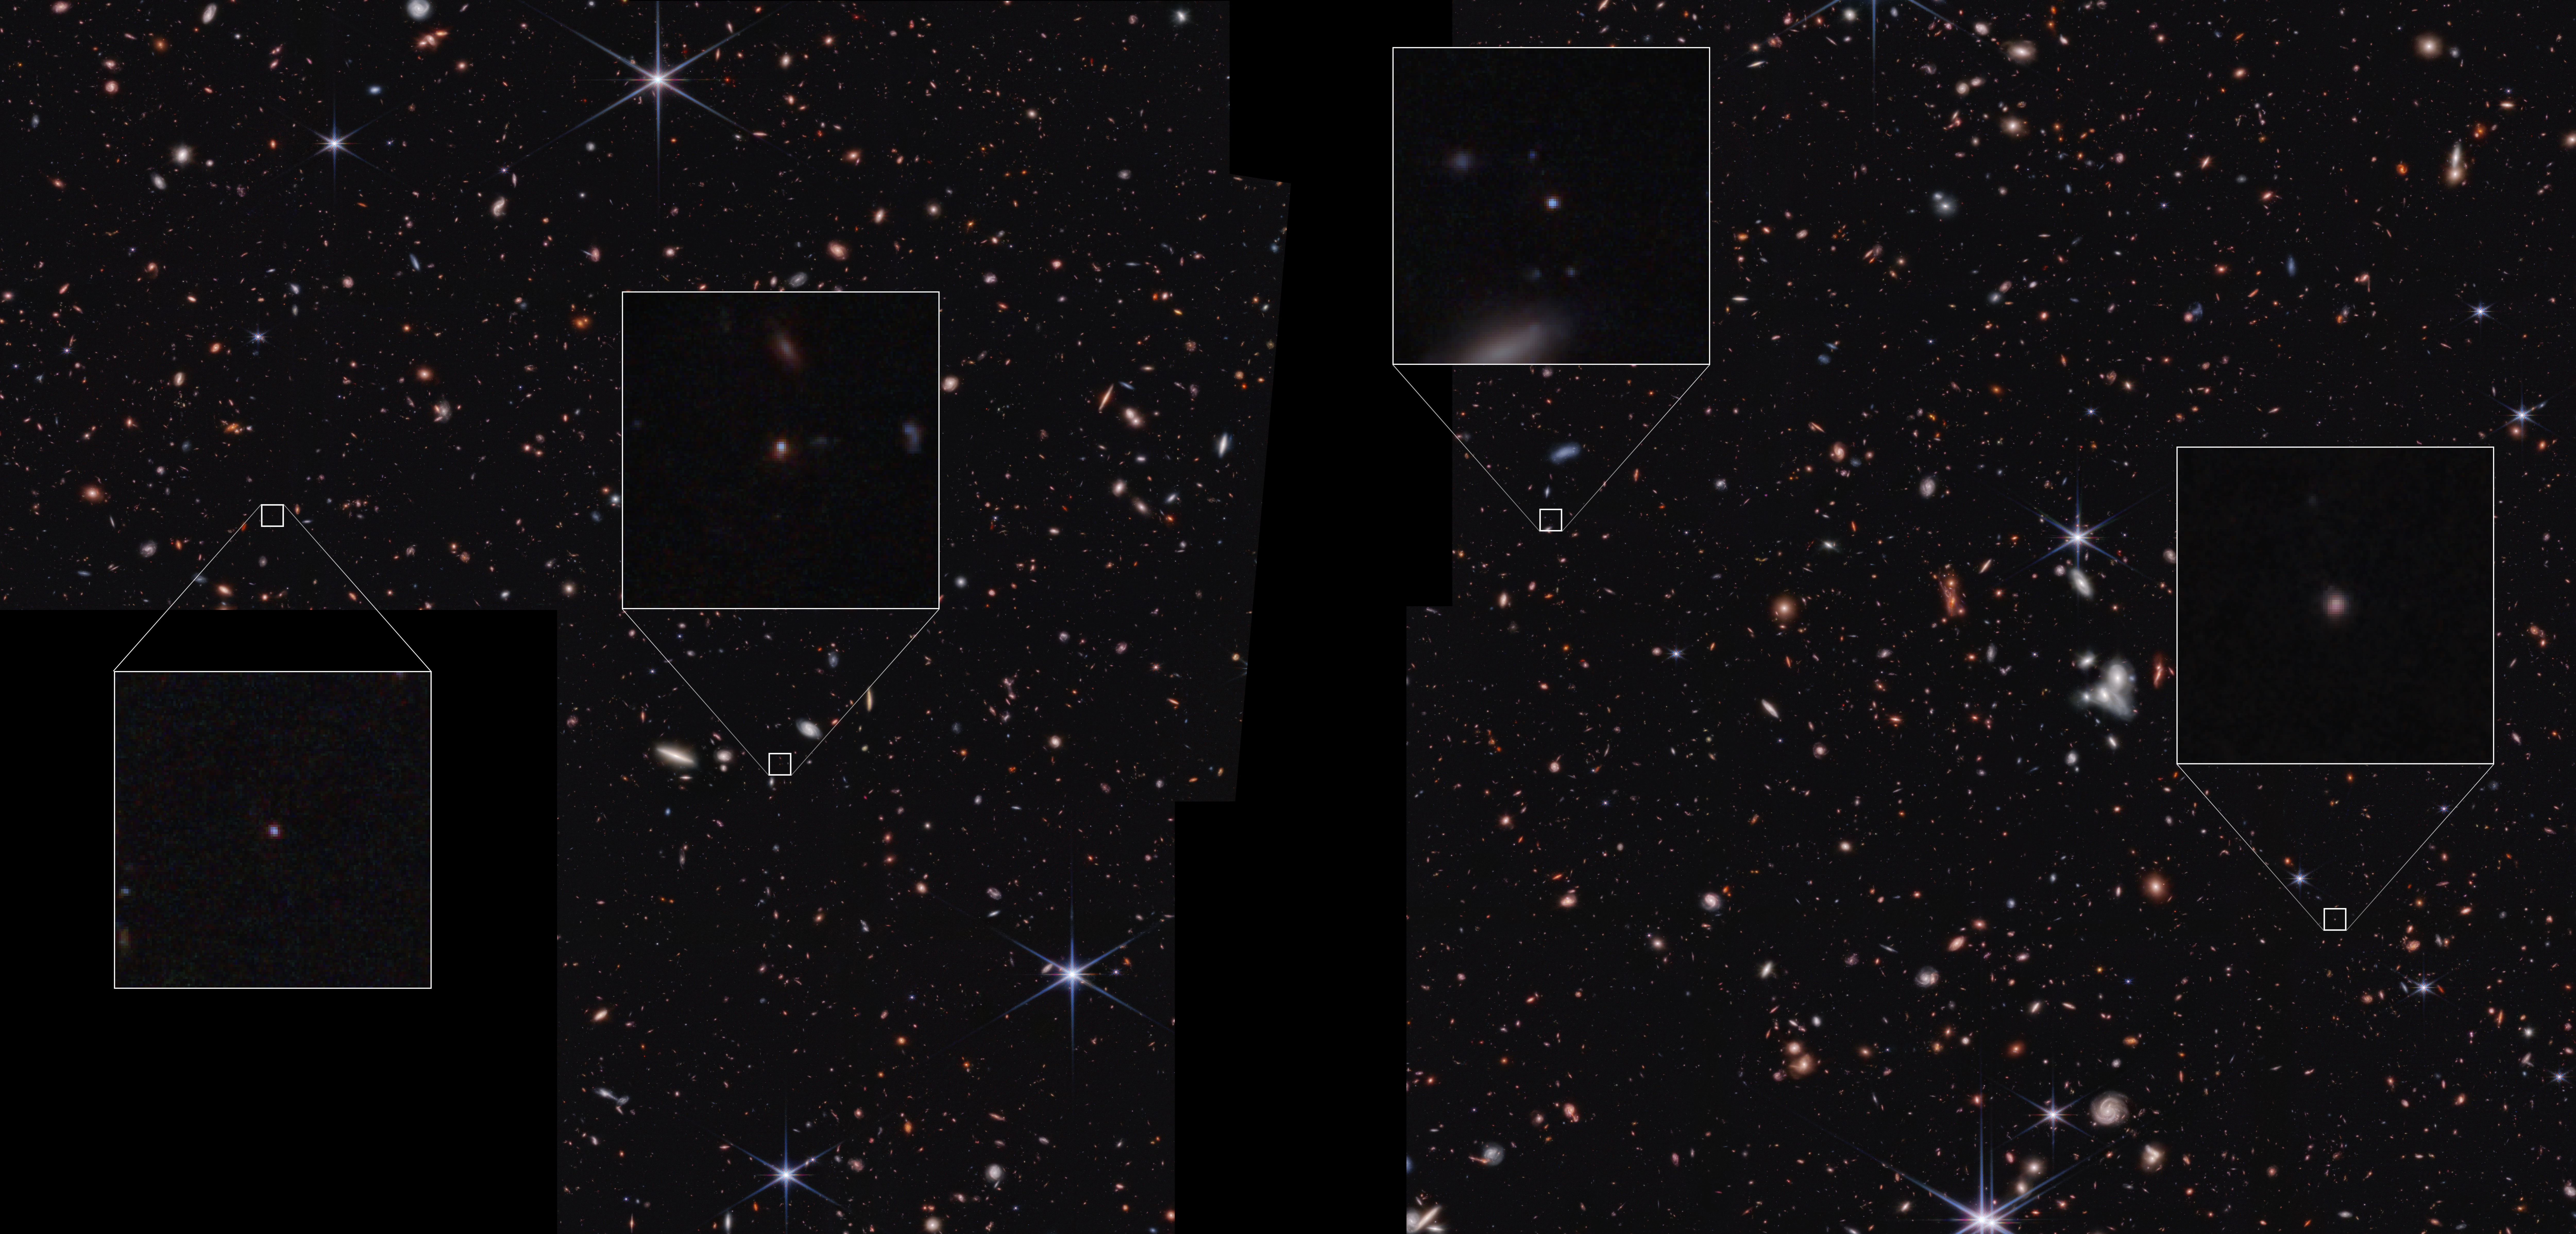

Scientists identify 'Astronomy’s Platypus' with Webb

After combing through the archive of the NASA/ESA/CSA James Webb Space Telescope of sweeping extragalactic cosmic fields, a small team of astronomers have identified a sample of galaxies that have a previously unseen combination of features.

Four of the nine galaxies in the newly identified “platypus” sample were discovered in NASA’s James Webb Space Telescope’s Cosmic Evolution Early Release Science Survey (CEERS) are shown in this image. One key feature that makes them distinct is their point-like appearance, even to a telescope that can capture as much detail as Webb.

The research was presented in a press conference at the 247th meeting of the American Astronomical Society.

Credit: NASA, ESA, CSA, S. Finkelstein (UT Austin), Image Processing: A. Pagan (STScI)